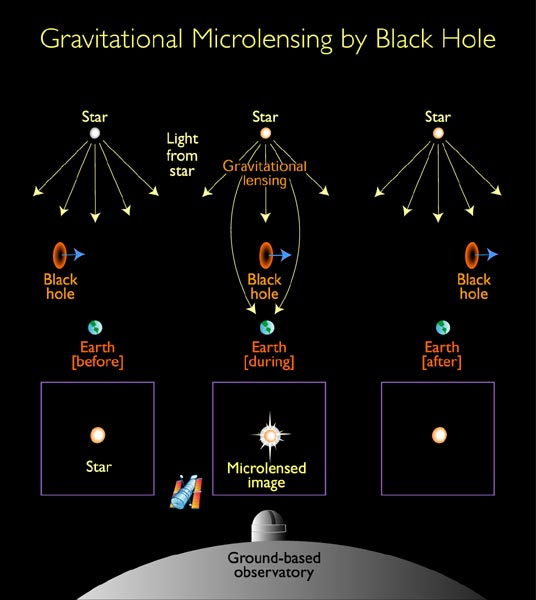

Gravitational microlensing by black hole (Illustration)

The intense gravitational field of a foreground black hole acts like a powerful lens in space. In the diagram, the black hole 'lens' distorts and brightens the image of a background star. The gravitation lens smears the star's image into two banana-shaped images with a total surface area several times that of the original stellar disk.

Though the angular separation is shown here, it is 100 times smaller than what HST can resolve. Hence the phenomenon is called 'microlensing'. HST and other telescopes instead see a brightening of the Star as the black hole drifts by, but they do not resolve the multiple images.

Credit: NASA/ESA